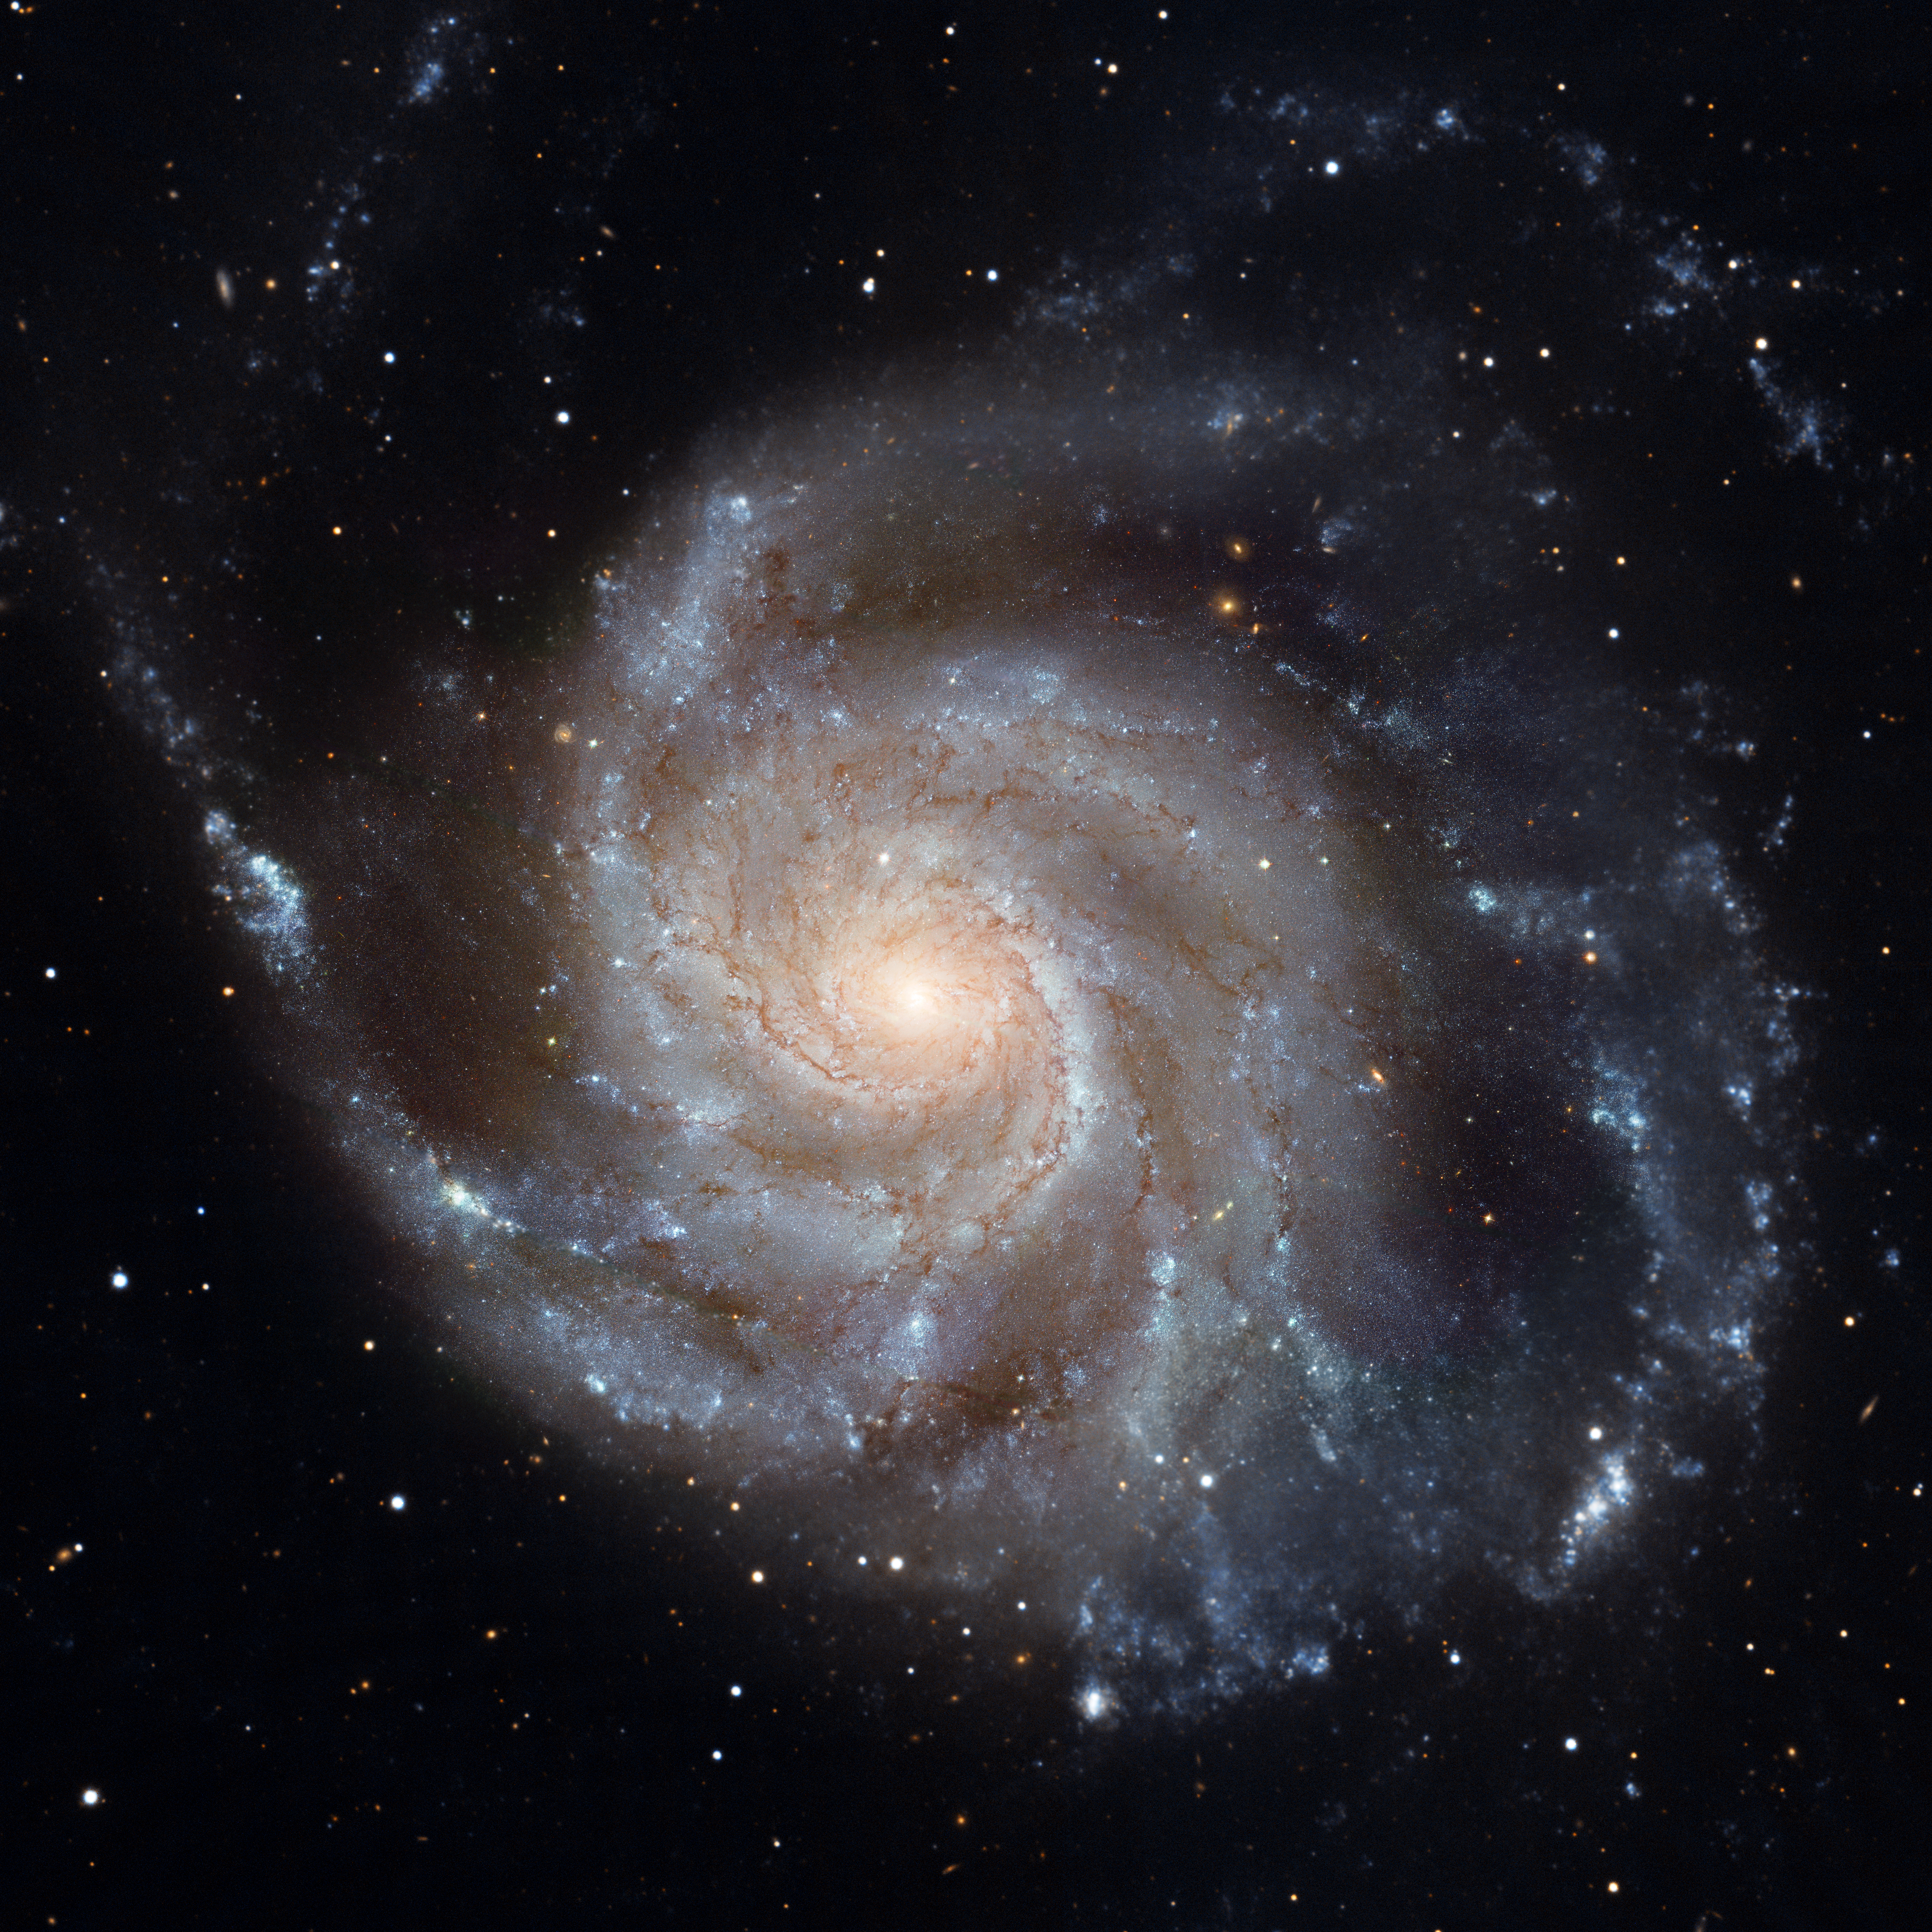

Hubble image of M101

This image shows spiral galaxy Messier 101.

Credit: NASA, ESA, CXC, SSC, and STScI